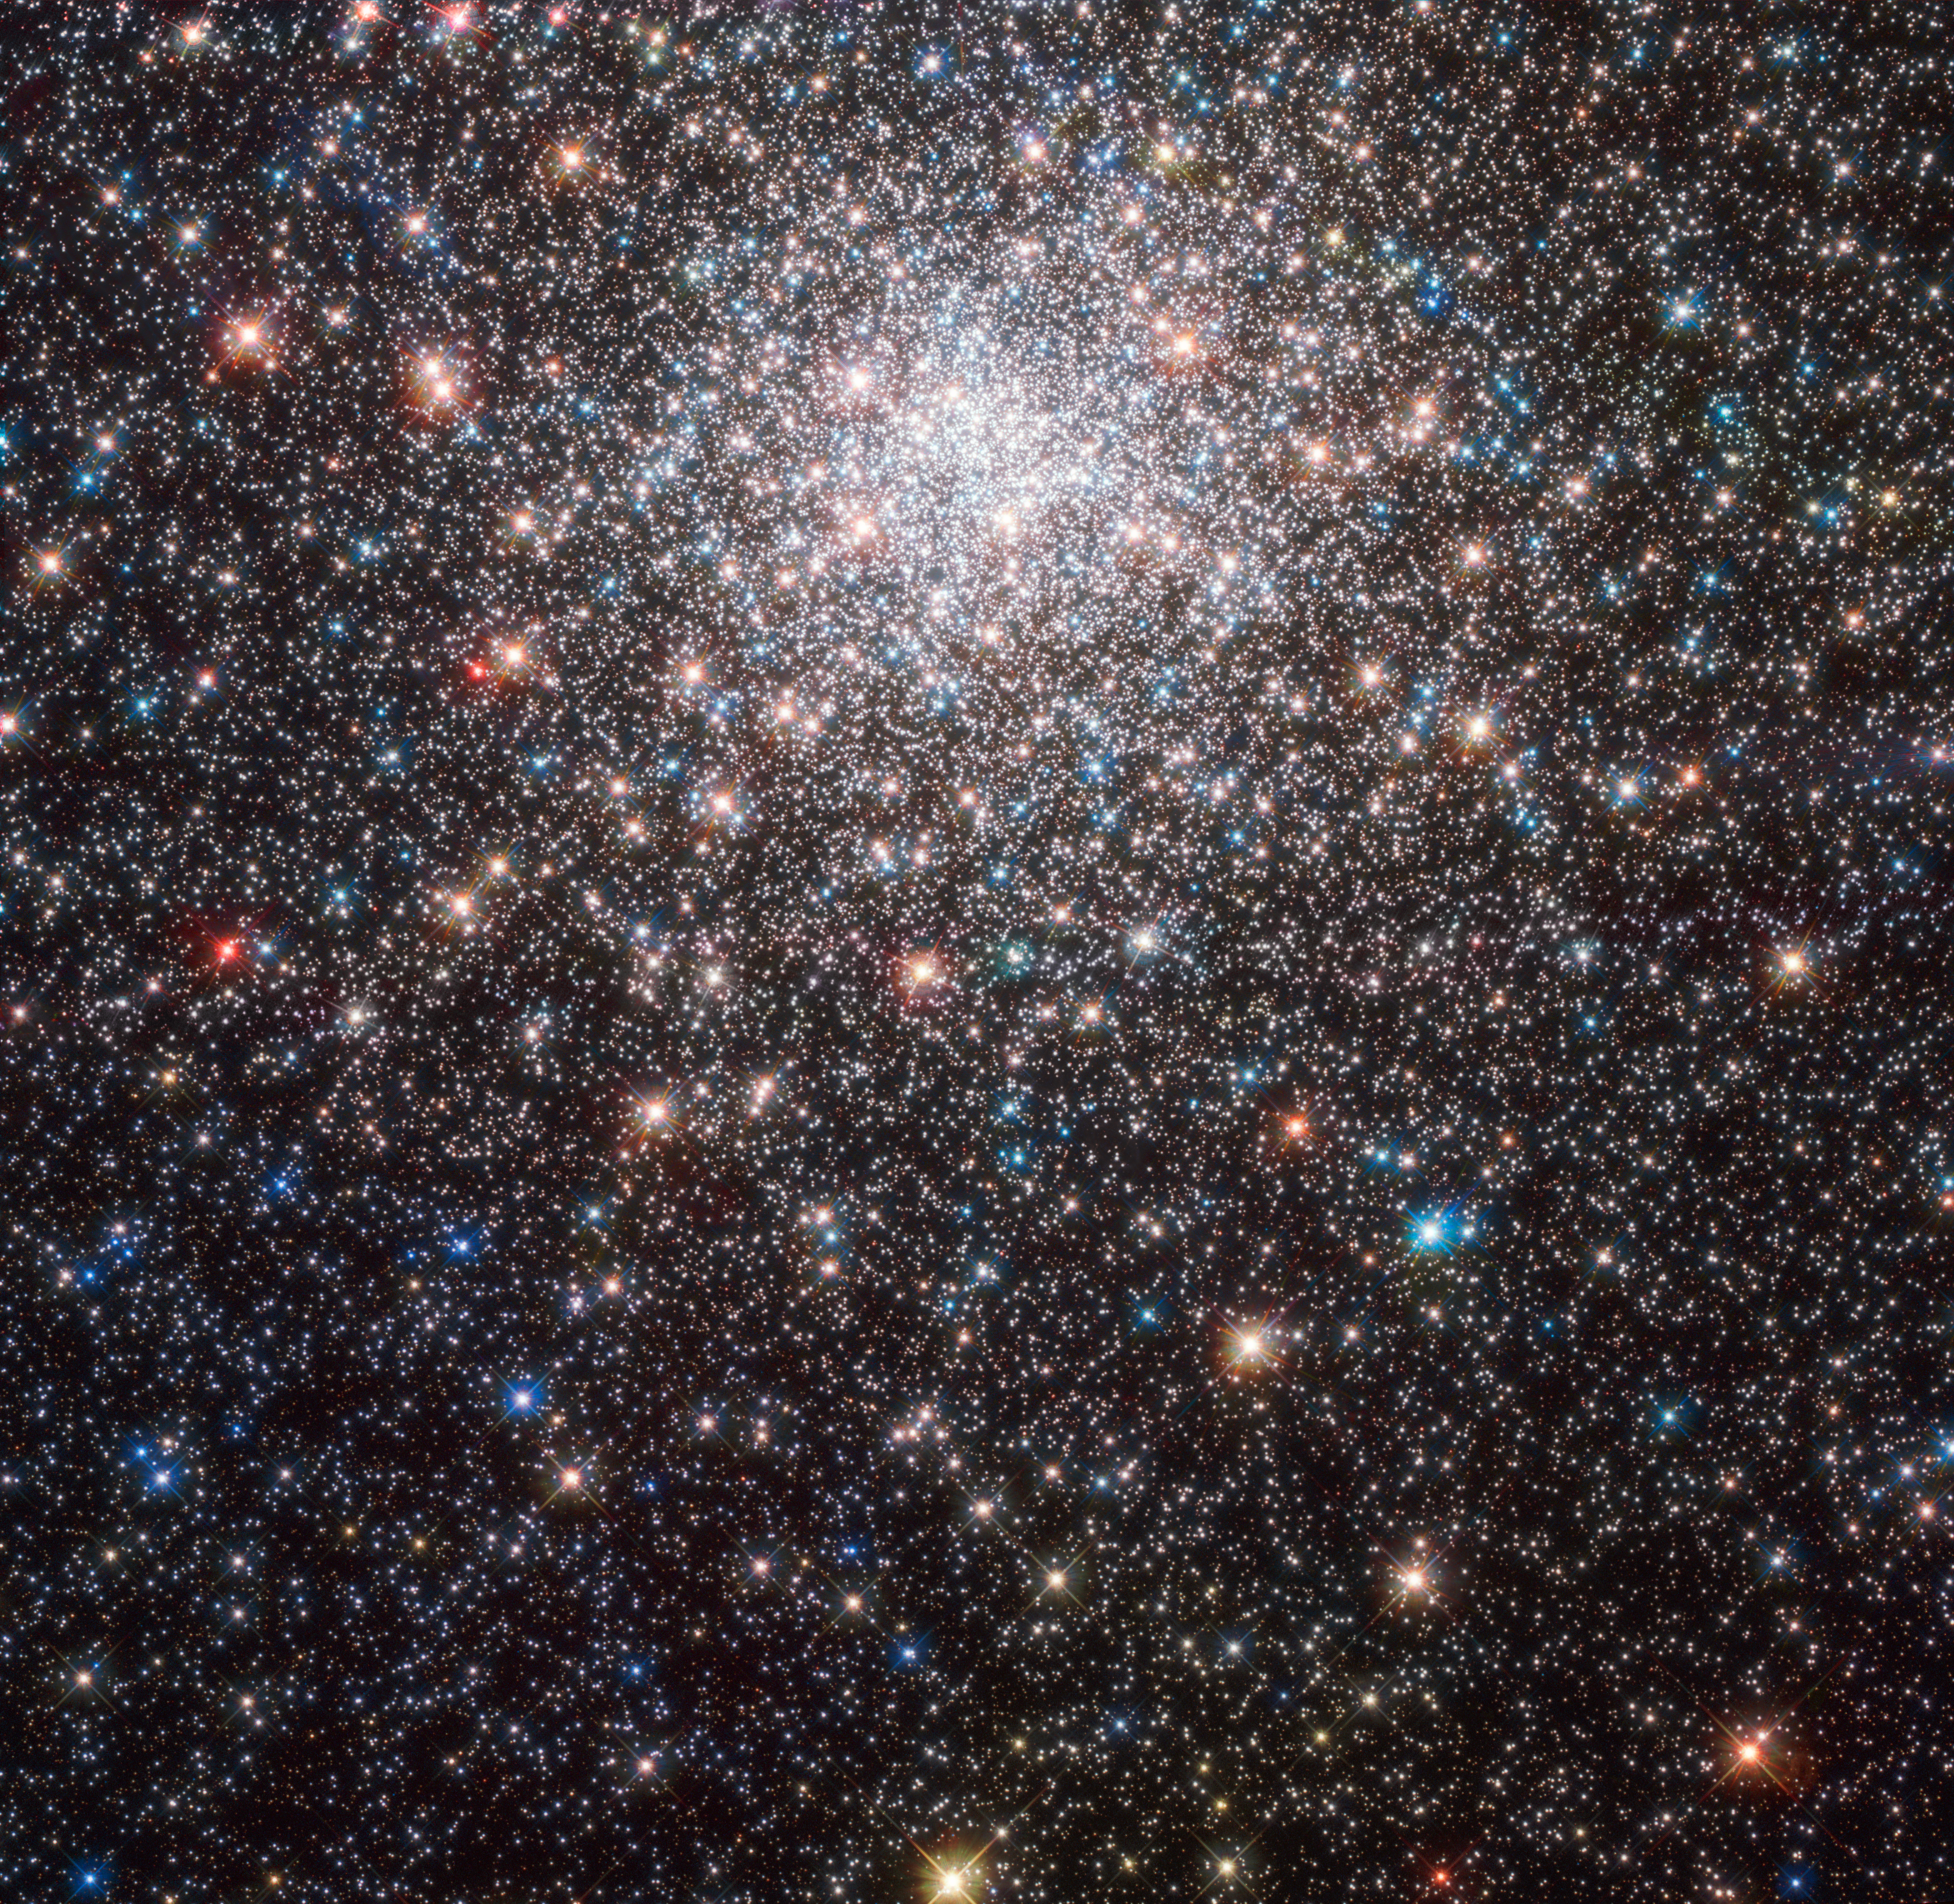

Nebulous, but no nebula

This Hubble Picture of the Week shows Messier 28, a globular cluster in the constellation of Sagittarius (The Archer), in jewel-bright detail. It is about 18 000 light-years away from Earth.

As its name suggests, this cluster belongs to the Messier catalogue of objects — however, when astronomer Charles Messier first added Messier 28 to his list in 1764, he catalogued it incorrectly, referring to it as a “[round] nebula containing no star”. While today we know nebulae to be vast, often glowing clouds of interstellar dust and ionised gases, until the early twentieth century a nebula represented any astronomical object that was not clearly localised and isolated. Any unidentified hazy light source could be called a nebula. In fact, all 110 of the astronomical objects identified by Messier were combined under the title of the Catalogue of Nebulae and Star Clusters. He classified many objects as diverse as star clusters and supernova remnants as nebulae. This includes Messier 28, pictured here — which, ironically, is actually a star cluster.

Messier’s mistake is understandable. Whilst Messier 28 is easily recognisable as a globular stellar cluster in this image, it is far less recognisable from Earth. Even with binoculars it is only visible very faintly, as the distorting effects of the Earth’s atmosphere reduce this luminous ancient cluster to a barely visible smudge in the sky. One would need larger telescopes to resolve single stars in Messier 28. Fortunately, from space Hubble allows Messier 28 to be seen in all its beauty — far more than a faint, shapeless, nebulous cloud.

Credit: ESA/Hubble & NASA, J. E. Grindlay et al.